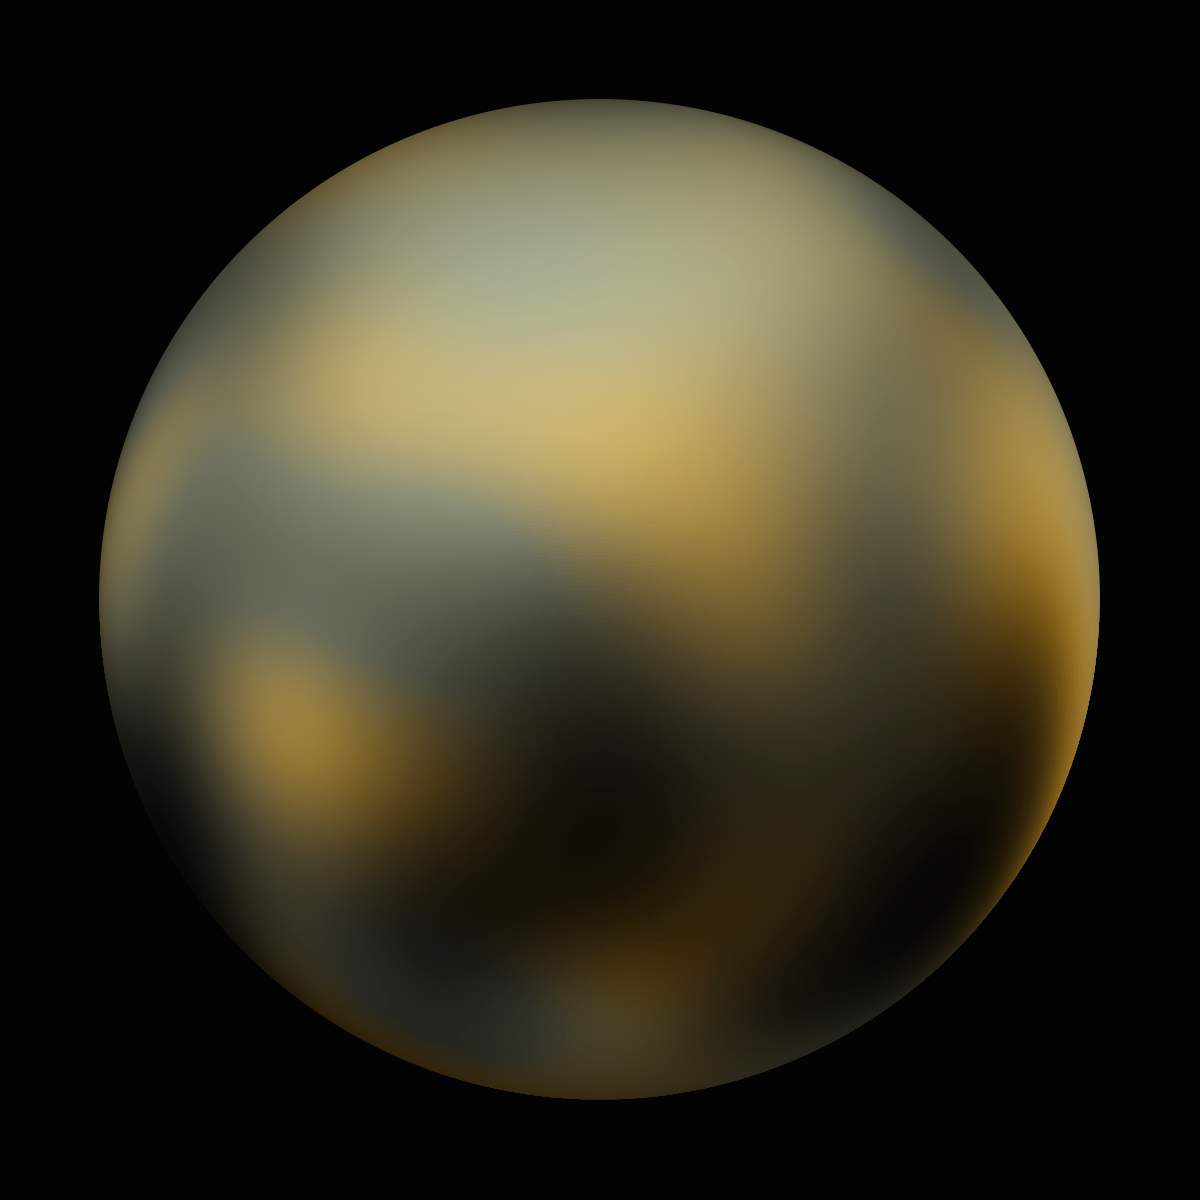

Pluto - 90° longitude

Pluto - 90° longitude.

Credit: NASA, ESA and M. Buie (Southwest Research Institute)